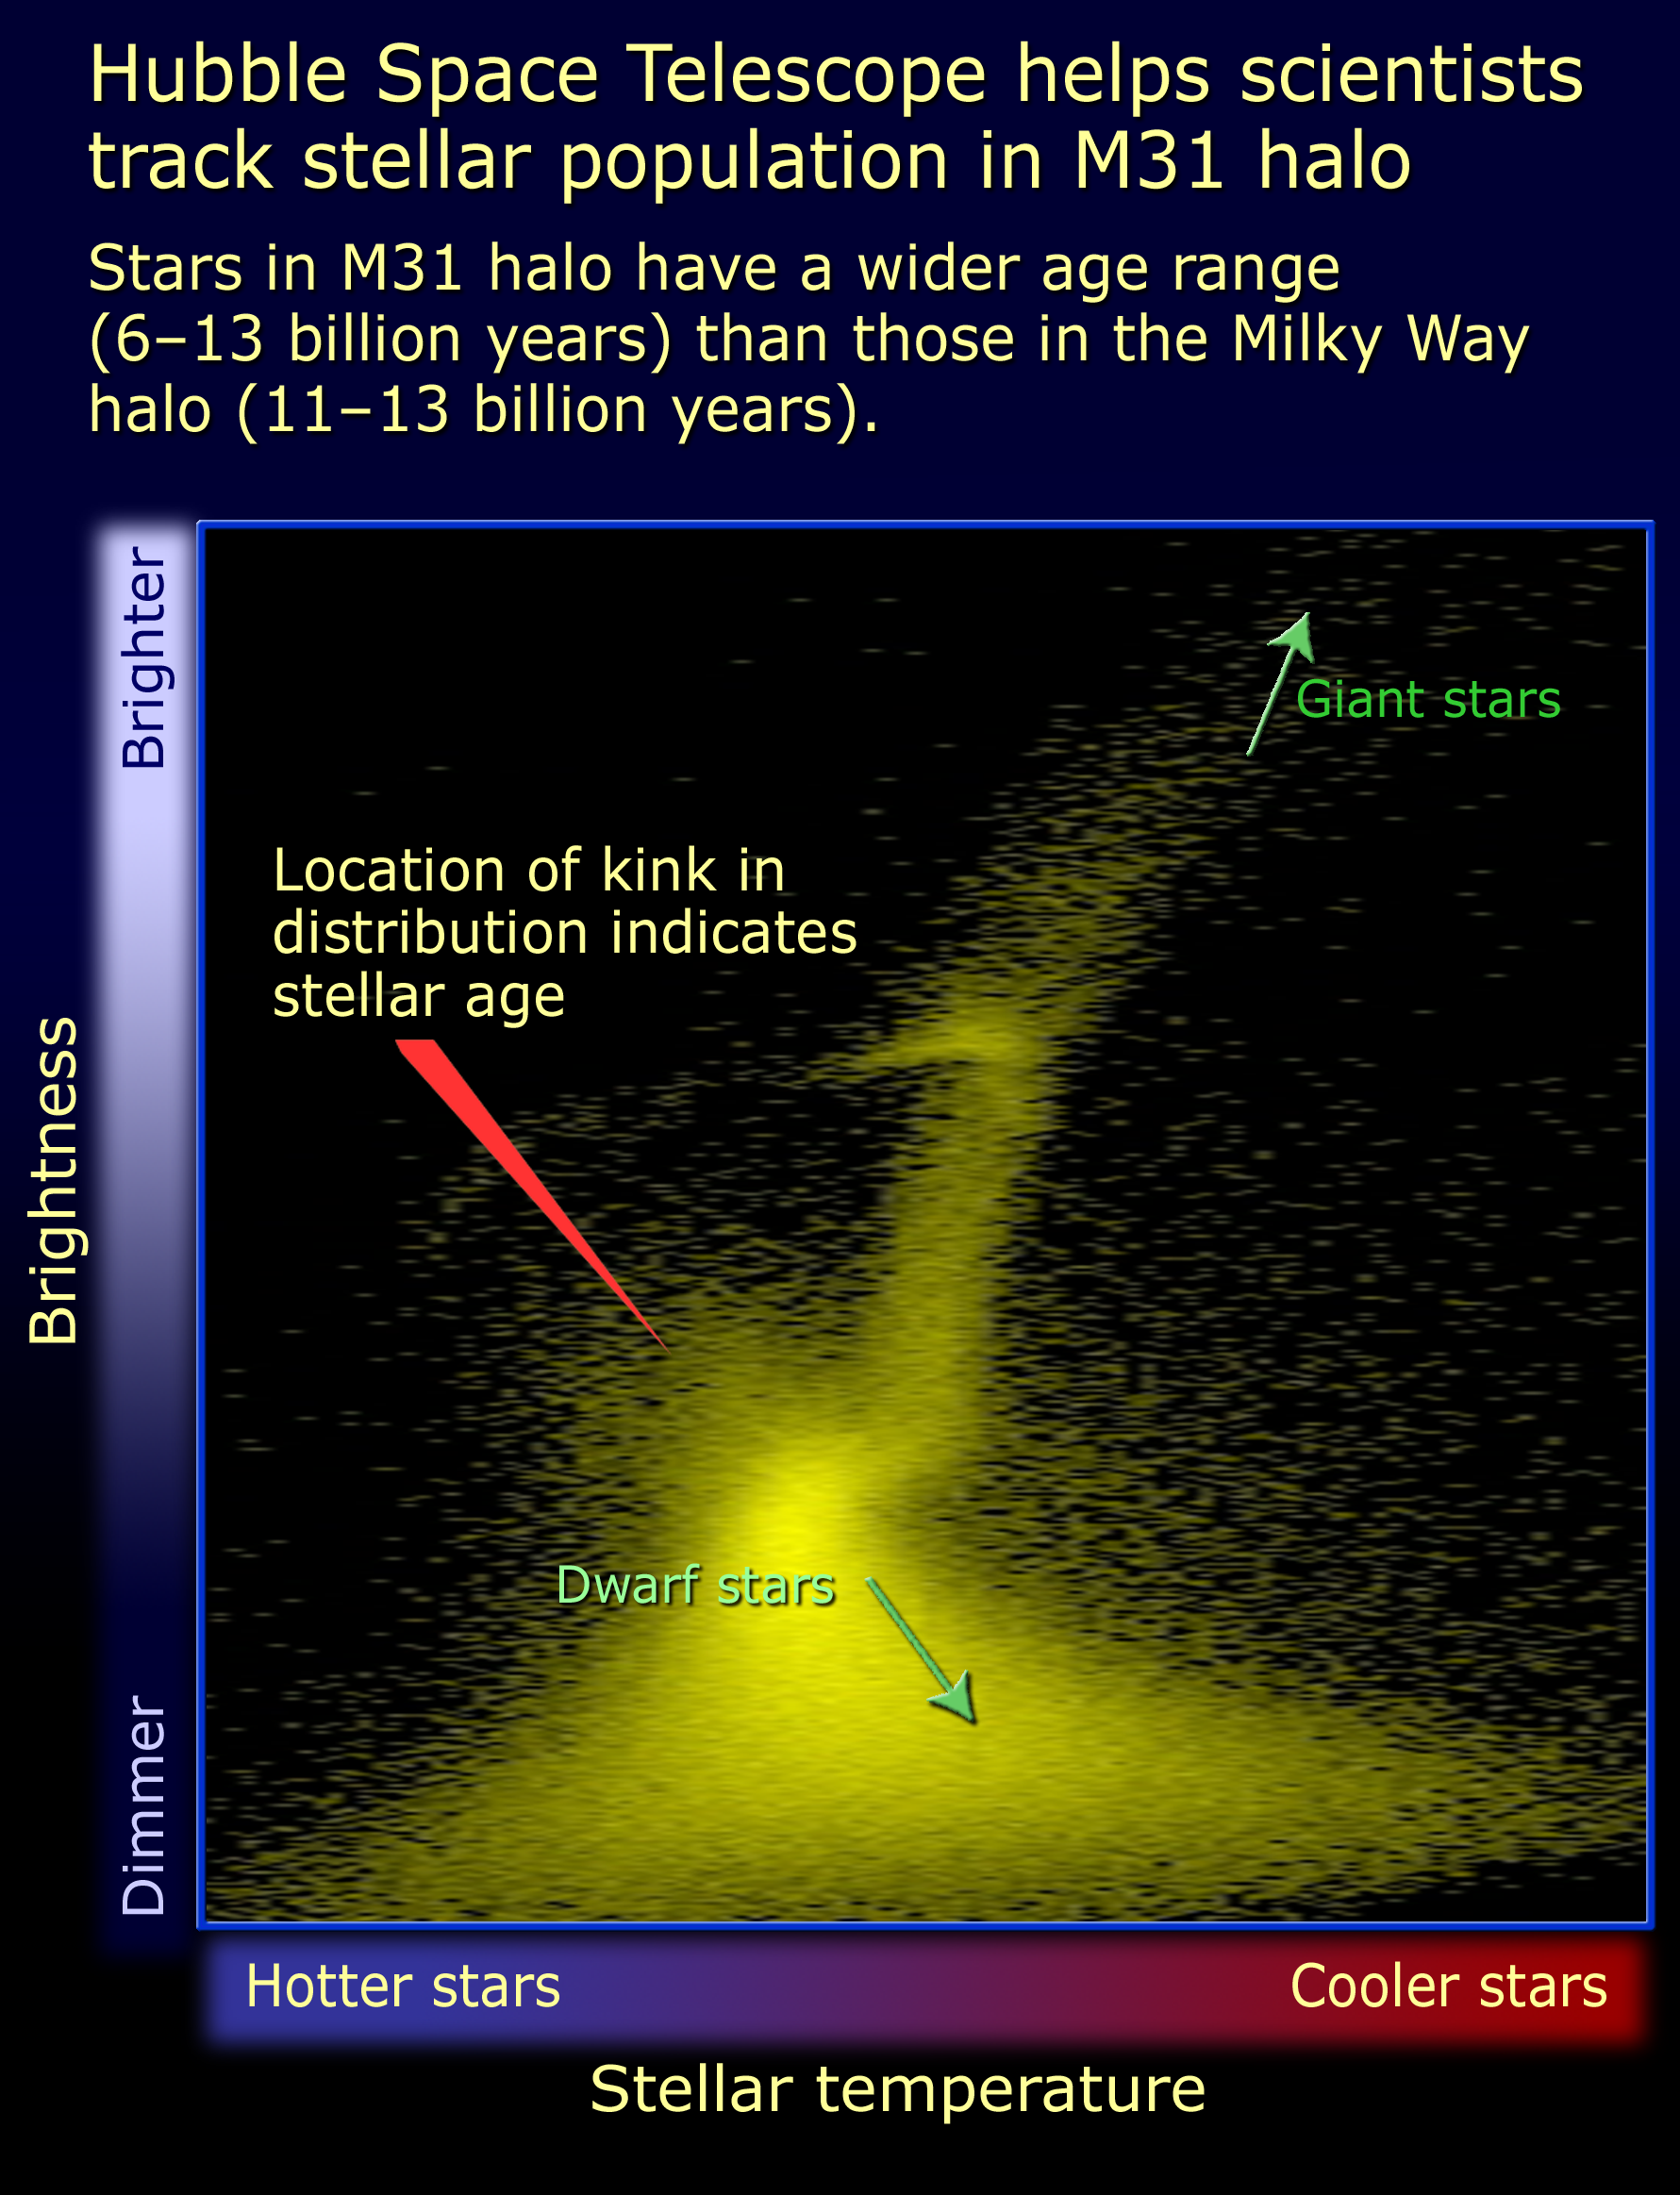

H-R diagram comparing ages of Milky Way and M31

Relying on the deepest visible-light images ever taken in space, astronomers using NASA's Hubble Space Telescope (HST) have reliably measured the age of the spherical halo of stars surrounding the neighboring Andromeda galaxy (M31).

Credit: NASA/ESA and A. Feild (STScI)